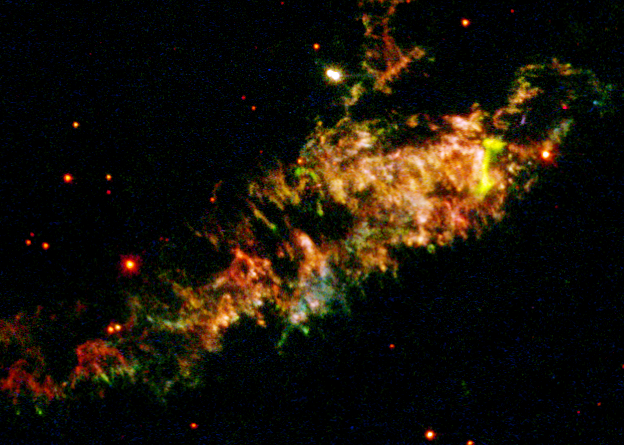

Details of Supernova Remnant Cassiopeia A

Glowing gaseous streamers of red, white, and blue - as well as green and pink - illuminate the heavens like Fourth of July fireworks. The colorful streamers that float across the sky in this photo taken by the NASA/ESA Hubble Space Telescope were created by the universe's biggest firecracker, the titanic supernova explosion of a massive star.

The light from the exploding star reached Earth 320 years ago. The dead star's shredded remains are called Cassiopeia A, or 'Cas A' for short. Cas A is the youngest known supernova remnant in our Milky Way Galaxy and resides 10, 000 light-years away in the constellation Cassiopeia, so the star actually blew up 10, 000 years before the light reached Earth in the late 1600s.

Credit: NASA/ESA and the Hubble Heritage Team (STScI/AURA)